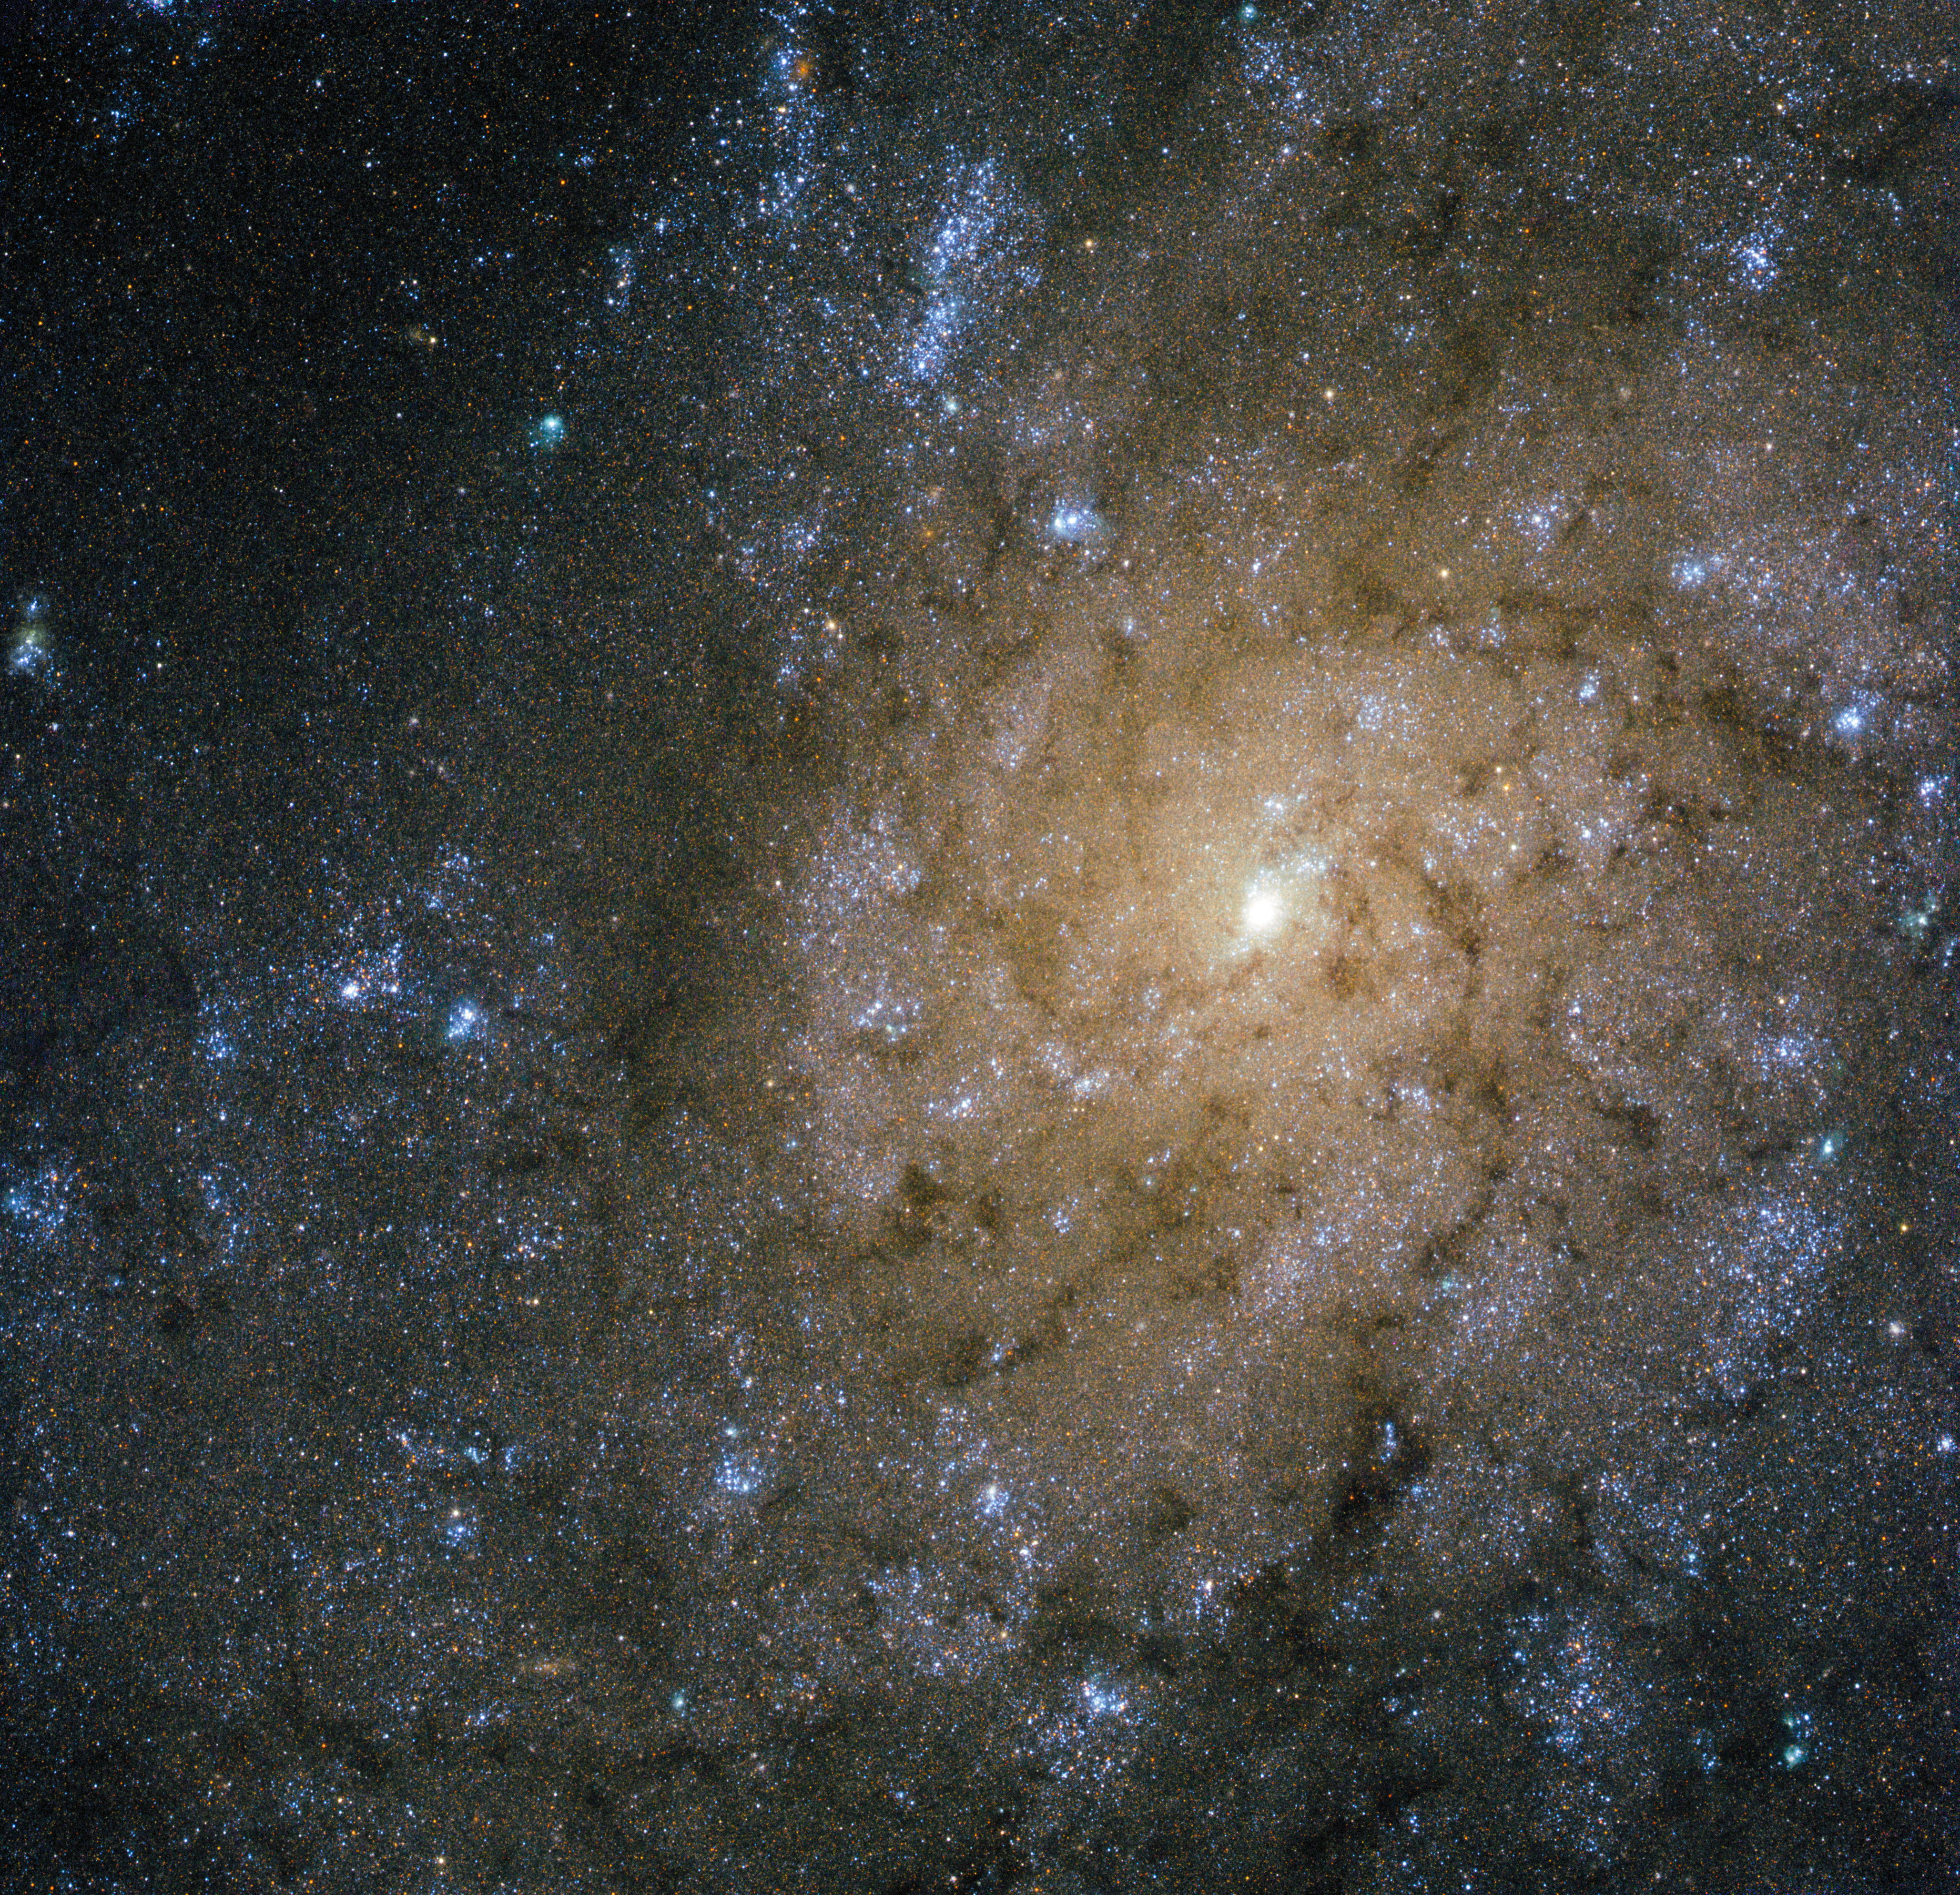

Jets and explosions in NGC 7793

This new image from the NASA/ESA Hubble Space Telescope shows NGC 7793, a spiral galaxy in the constellation of Sculptor some 13 million light-years away from Earth. NGC 7793 is one of the brightest galaxies in the Sculptor Group, and one of the closest groups of galaxies to the Local Group — the group of galaxies containing our galaxy, the Milky Way and the Magellanic Clouds.

The image shows NGC 7793’s spiral arms and small central bulge. Unlike some other spirals, NGC 7793 doesn’t have a very pronounced spiral structure, and its shape is further muddled by the mottled pattern of dark dust that stretches across the frame. The occasional burst of bright pink can be seen in the galaxy, highlighting stellar nurseries containing newly-forming baby stars.

Although it may look serene and beautiful from our perspective, this galaxy is actually a very dramatic and violent place. Astronomers have discovered a powerful microquasar within NGC 7793 — a system containing a black hole actively feeding on material from a companion star. While many full-sized quasars are known at the cores of other galaxies, it is unusual to find a quasar in a galaxy’s disc rather than at its centre.

Micro-quasars are almost like scale models — they allow astronomers to study quasars in detail. As material falls inwards towards this black hole, it creates a swirling disc around it. Some of the infalling gas is propelled violently outwards at extremely high speeds, creating jets streaking out into space in opposite directions. In the case of NGC 7793, these jets are incredibly powerful, and are in the process of creating an expanding bubble of hot gas some 1000 light-years across.

Credit: ESA/Hubble & NASA
Acknowledgement: D. Calzetti (University of Massachusetts) and the LEGUS Team